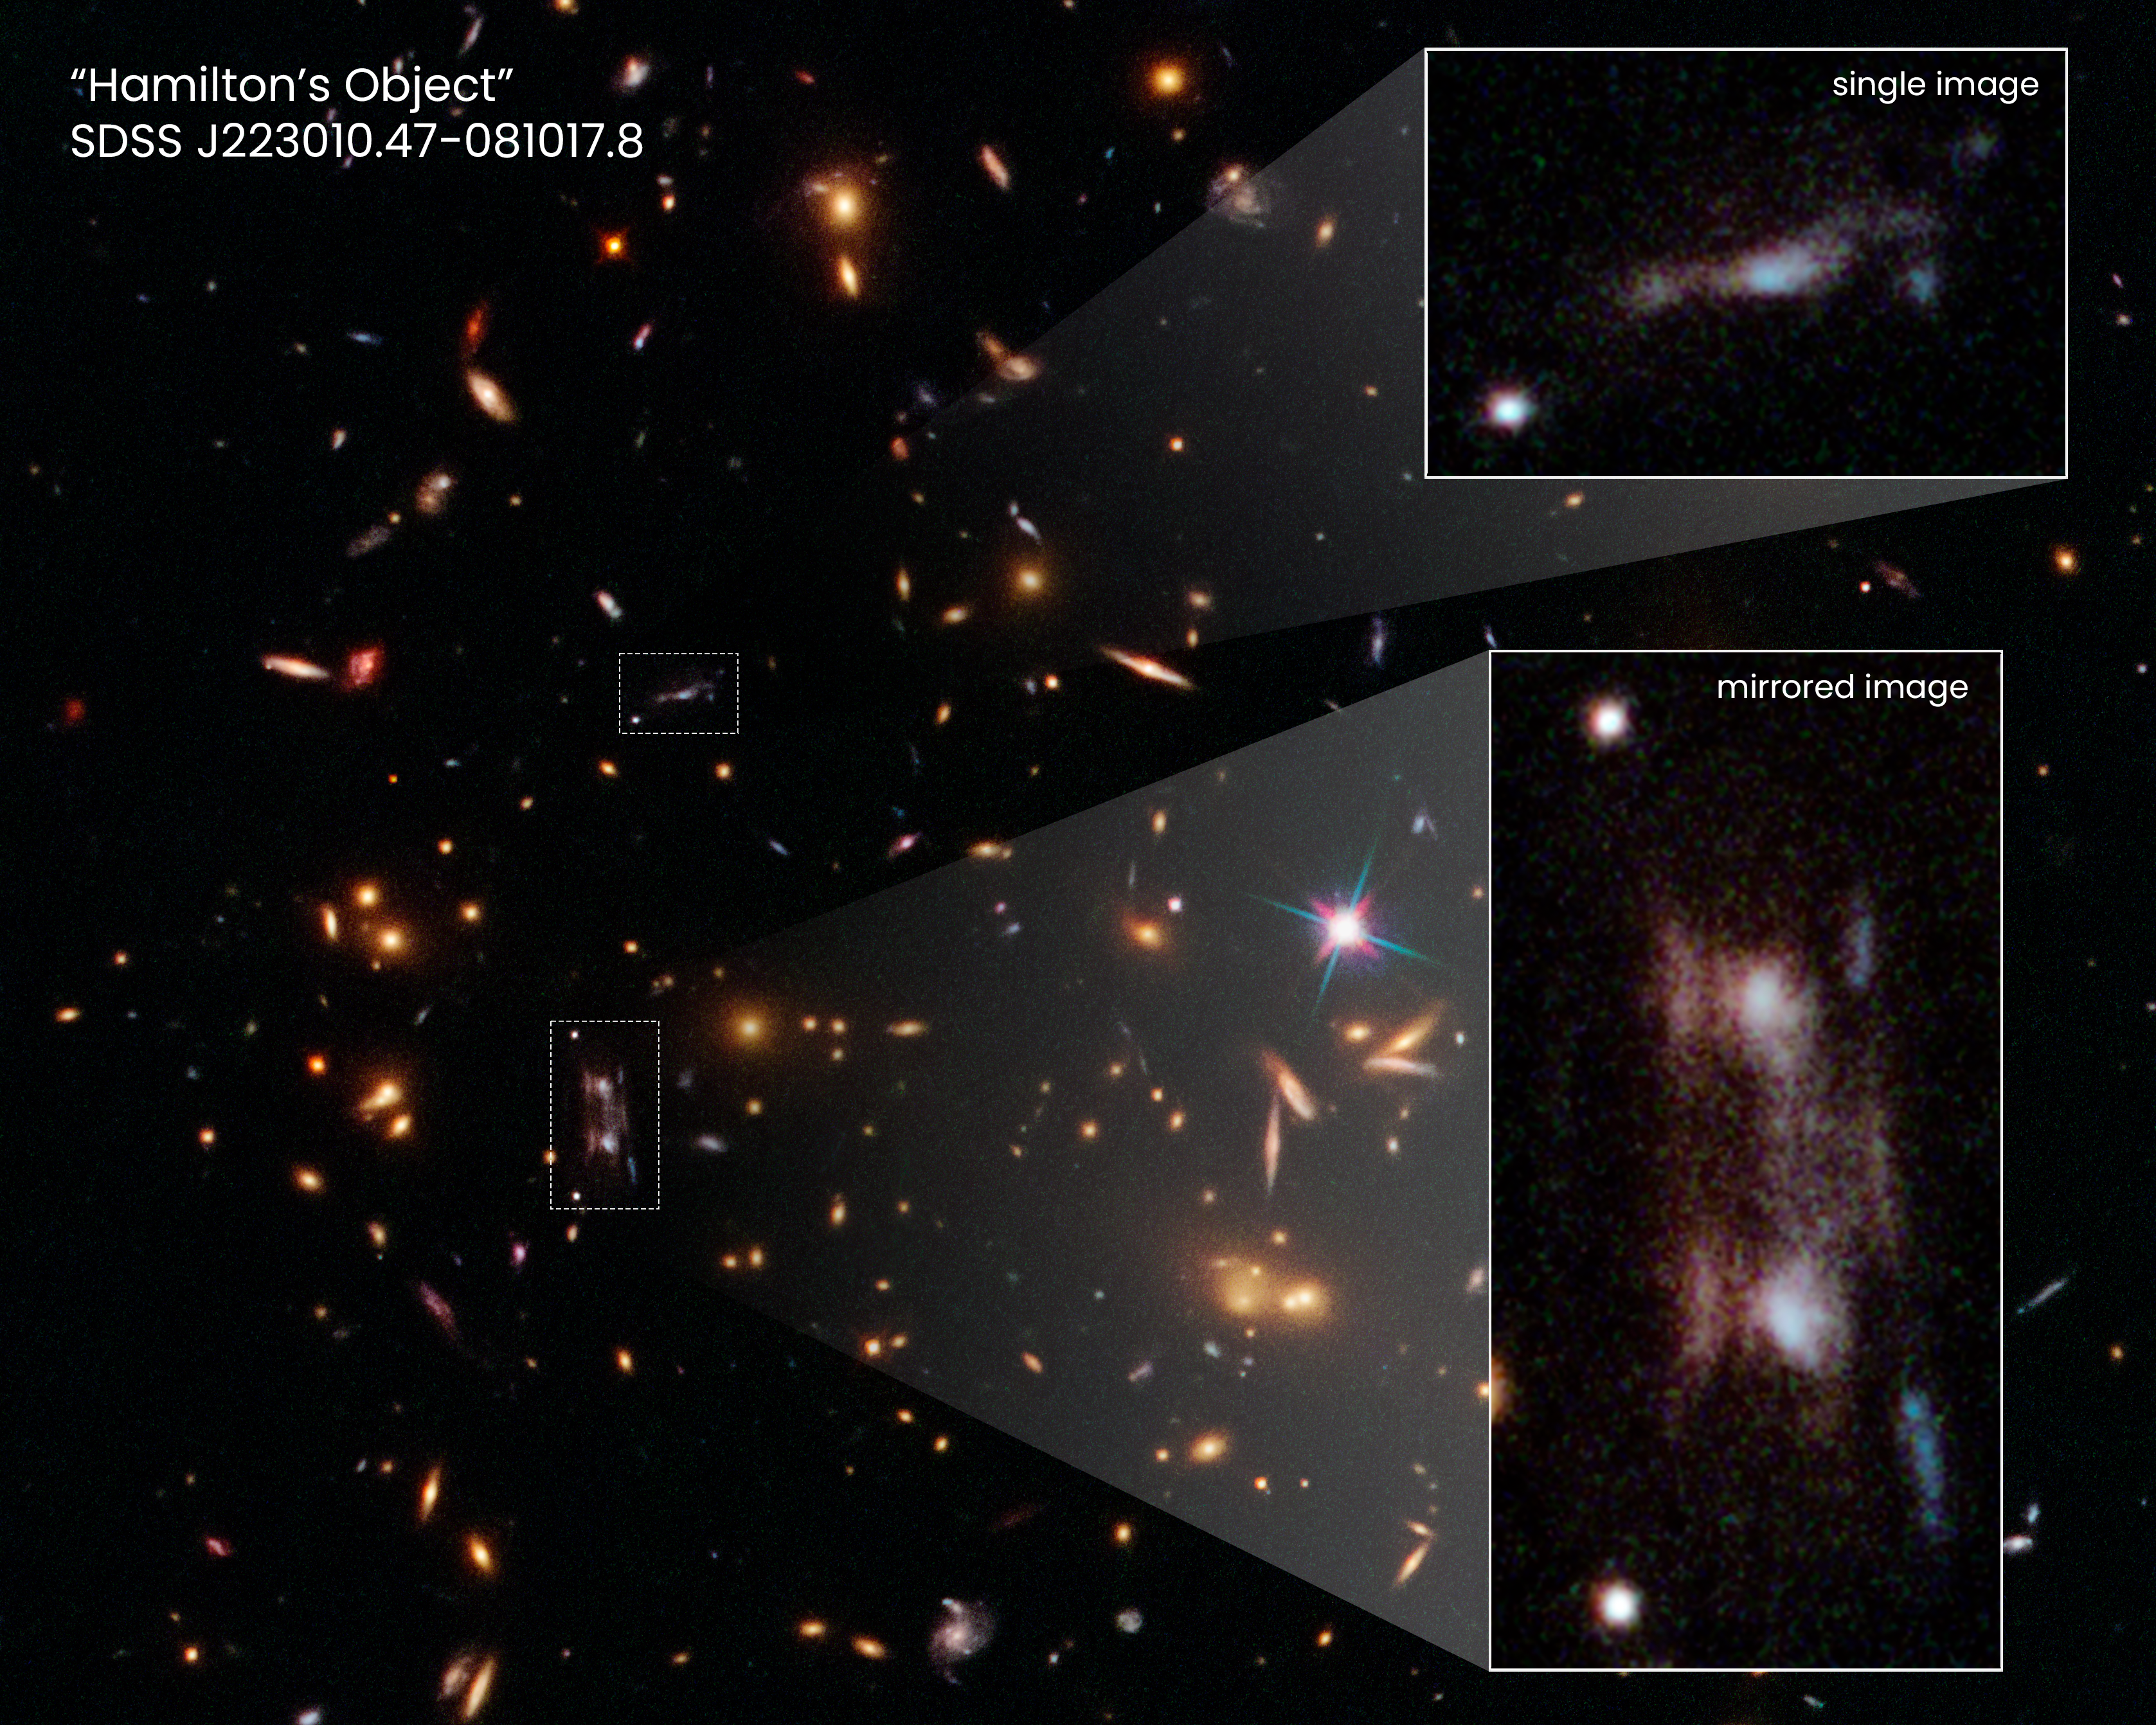

Hubble Showcases Hamilton’s Object

This NASA/ESA Hubble Space Telescope snapshot shows three magnified images of a distant galaxy embedded in a cluster of galaxies.

These images are produced by a trick of nature called gravitational lensing. The galaxy cluster's immense gravity magnifies and distorts the light from the distant galaxy behind it, creating the multiple images. The galaxy cluster, catalogued as SDSS J223010.47-081017.8, is 7 billion light-years from Earth.

Hubble has observed many gravitationally lensed galaxies. However, the images spotted in this Hubble snapshot are unique. Two of the magnified images, shown in the pull-out at bottom right, are exact copies of each other. The two bright ovals are the cores of the galaxy. This rare phenomenon occurs because the background galaxy straddles a ripple in the fabric of space. This “ripple” is an area of greatest magnification, caused by the gravity of dense amounts of dark matter, the unseen glue that makes up most of the universe's mass. As light from the faraway galaxy passes through the cluster along this ripple, two mirror images are produced, along with a third image that can be seen off to the side.

A close-up of the third image is shown in the pull-out at top right. This image most closely resembles the remote galaxy, which is located more than 11 billion light-years away. Based on a reconstruction of this image, the researchers determined that the distant galaxy appears to an edge-on, barred spiral with ongoing, clumpy star formation.

The mirror images are named “Hamilton’s Object" for the astronomer who discovered them.

Credit: NASA, ESA, Richard E. Griffiths (UH Manoa), Jenny Wagner (ZAH). Joseph DePasquale (STScI)